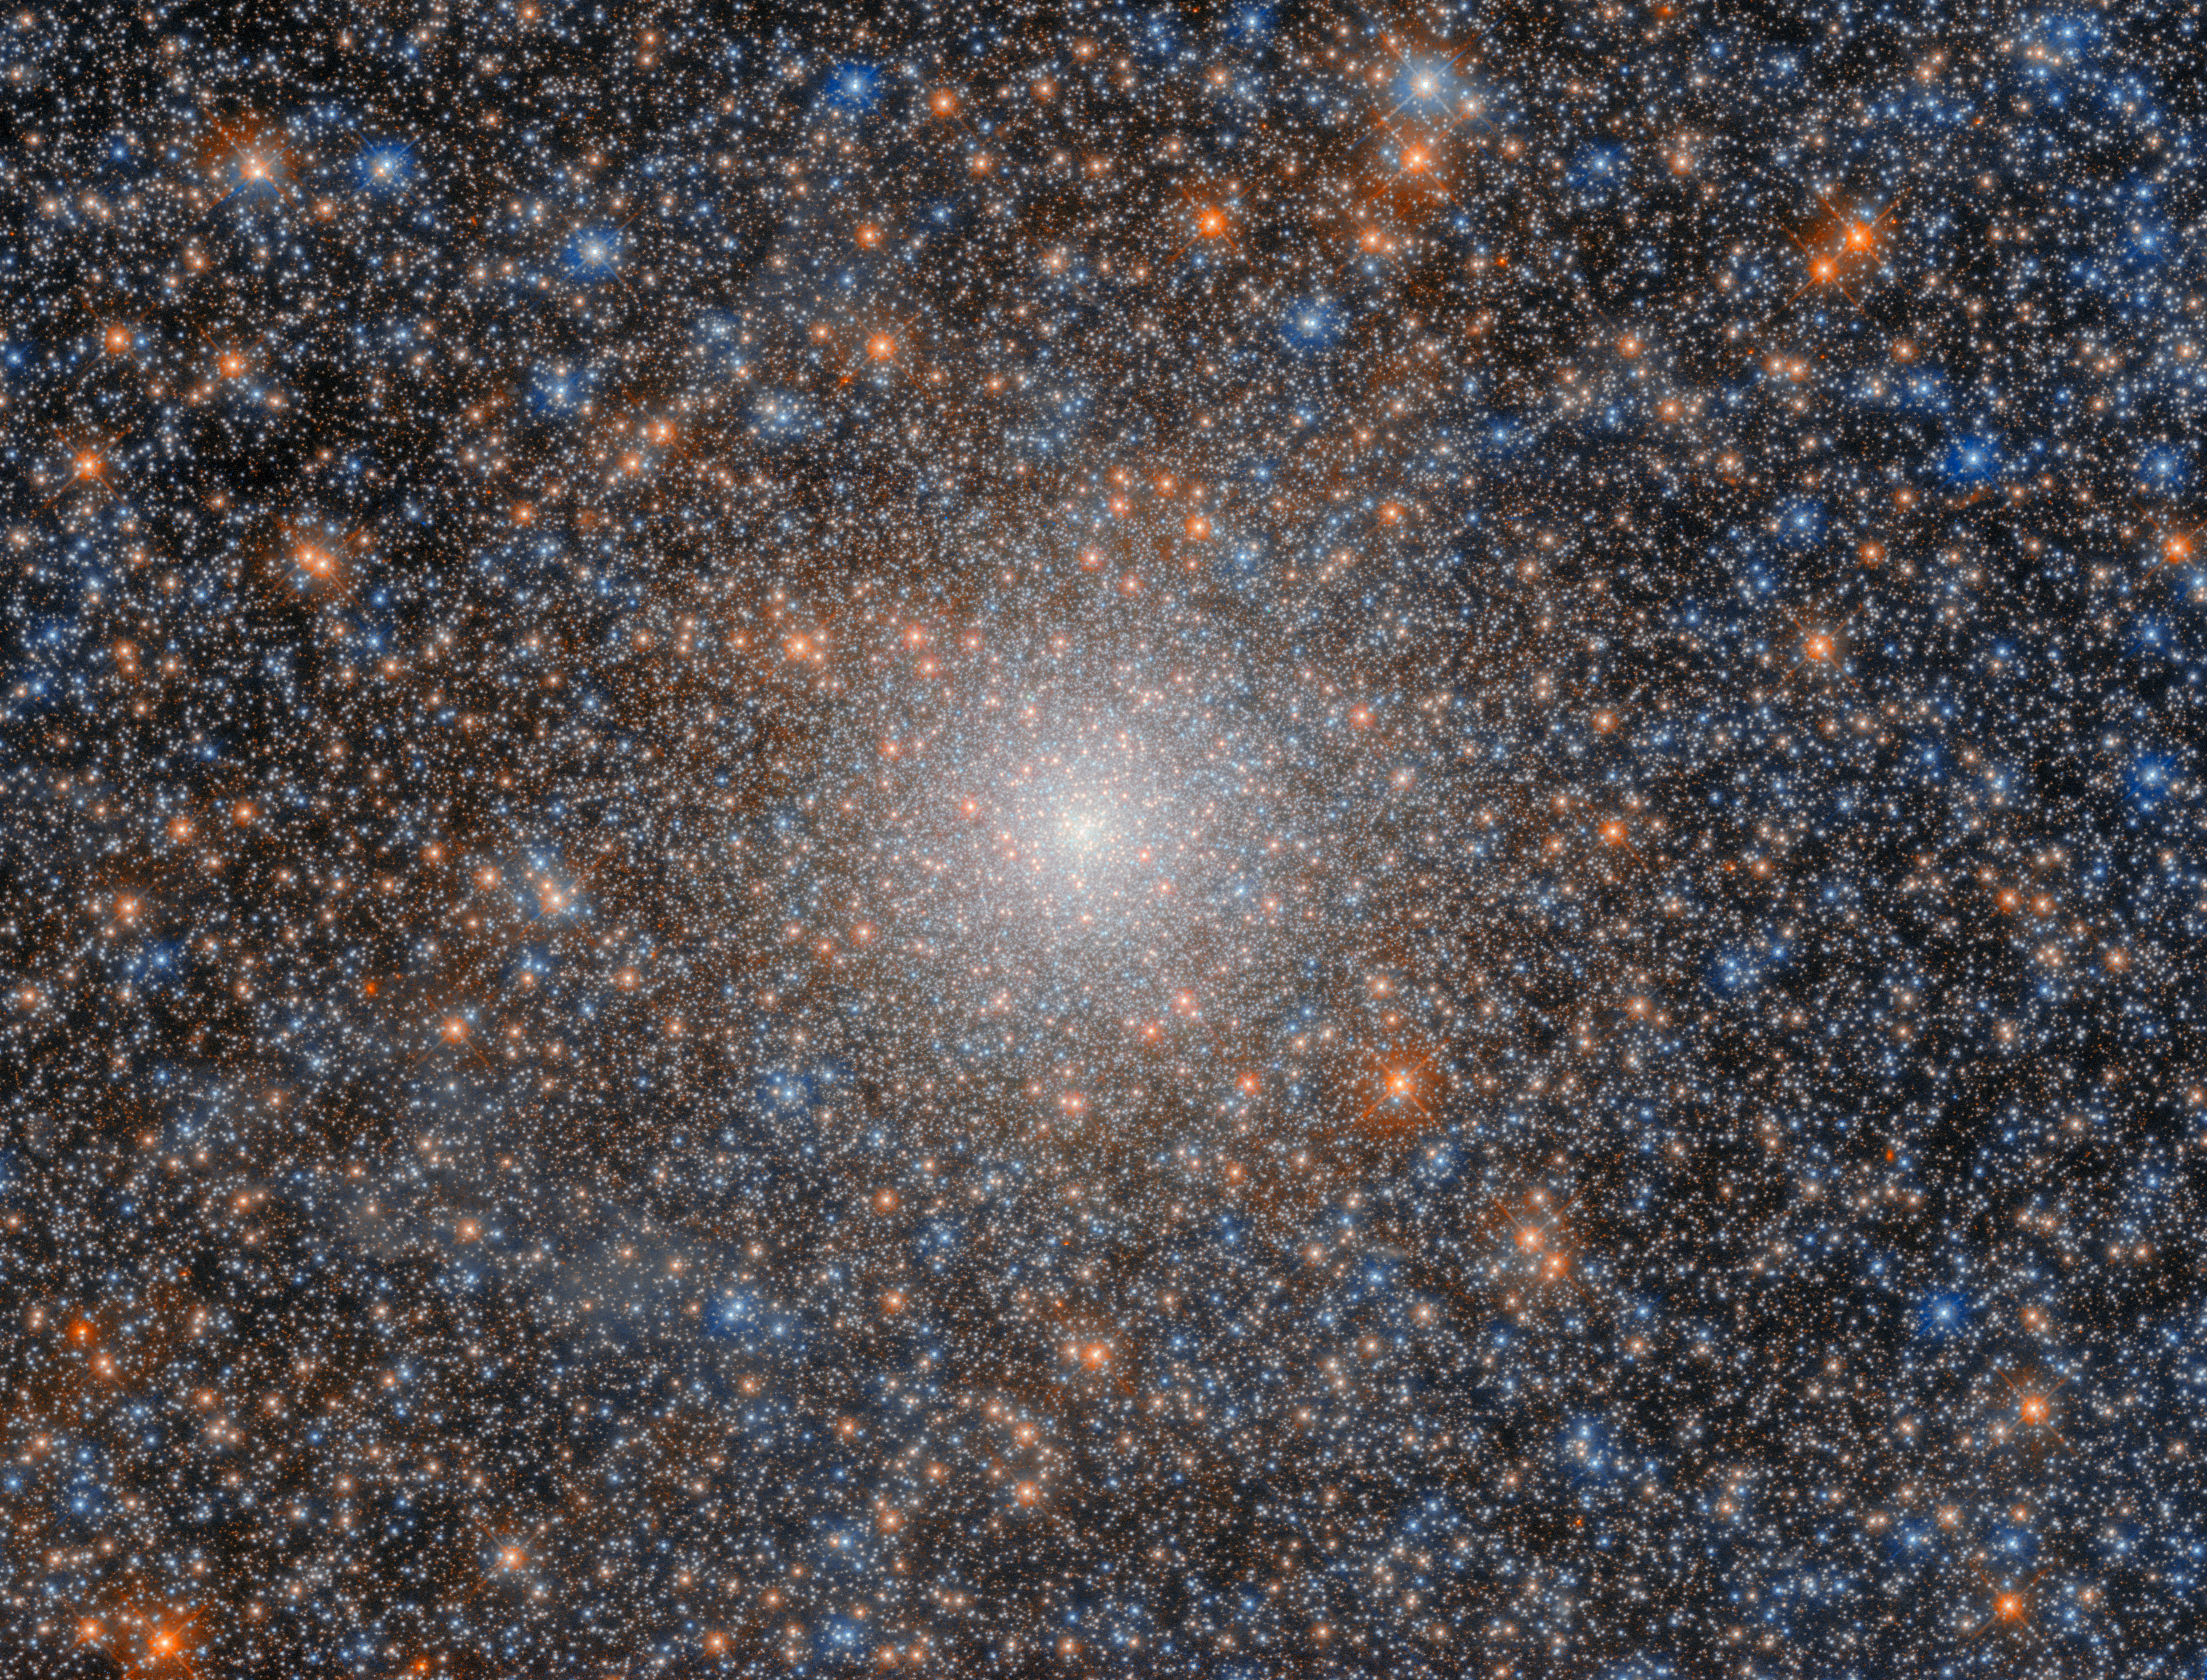

An ancient witness

The globular cluster NGC 2005, featured in this Hubble Picture of the Week, is not unusual in and of itself; but it is a peculiarity in relation to its surroundings. NGC 2005 is located about 750 light-years from the heart of the Large Magellanic Cloud (LMC), which is the Milky Way’s largest satellite galaxy and which itself lies about 162 000 light-years from Earth. Globular clusters are densely-packed clusters that can constitute tens of thousands or millions of stars. Their density means that they are tightly gravitationally bound and are therefore very stable. This stability contributes to their longevity: globular clusters can be billions of years old, and as such often comprise very old stars. Thus, studying globular clusters in space can be a little like studying fossils on Earth: where fossils give insights into the characteristics of ancient plants and animals, globular clusters illuminate the characteristics of ancient stars.

Current theories of galaxy evolution predict that galaxies merge with one another. It is widely thought that the relatively large galaxies that we observe in the modern Universe were formed via the merging of smaller galaxies. If this is correct, then astronomers would expect to see evidence that the most ancient stars in nearby galaxies originated in different galactic environments. As globular clusters are known to contain ancient stars, and because of their stability, they are an excellent laboratory to test this hypothesis.

NGC 2005 is such a globular cluster, and its very existence has provided evidence to support the theory of galaxy evolution via mergers. Indeed, the stars in NGC 2005 have a chemical composition that is distinct from the stars in the LMC around it. This suggests that the LMC underwent a merger with another galaxy somewhere in its history. That other galaxy has long-since merged and otherwise dispersed, but NGC 2005 remains behind as an ancient witness to the long-past merger.

Credit: ESA/Hubble & NASA, F. Niederhofer, L. Girardi